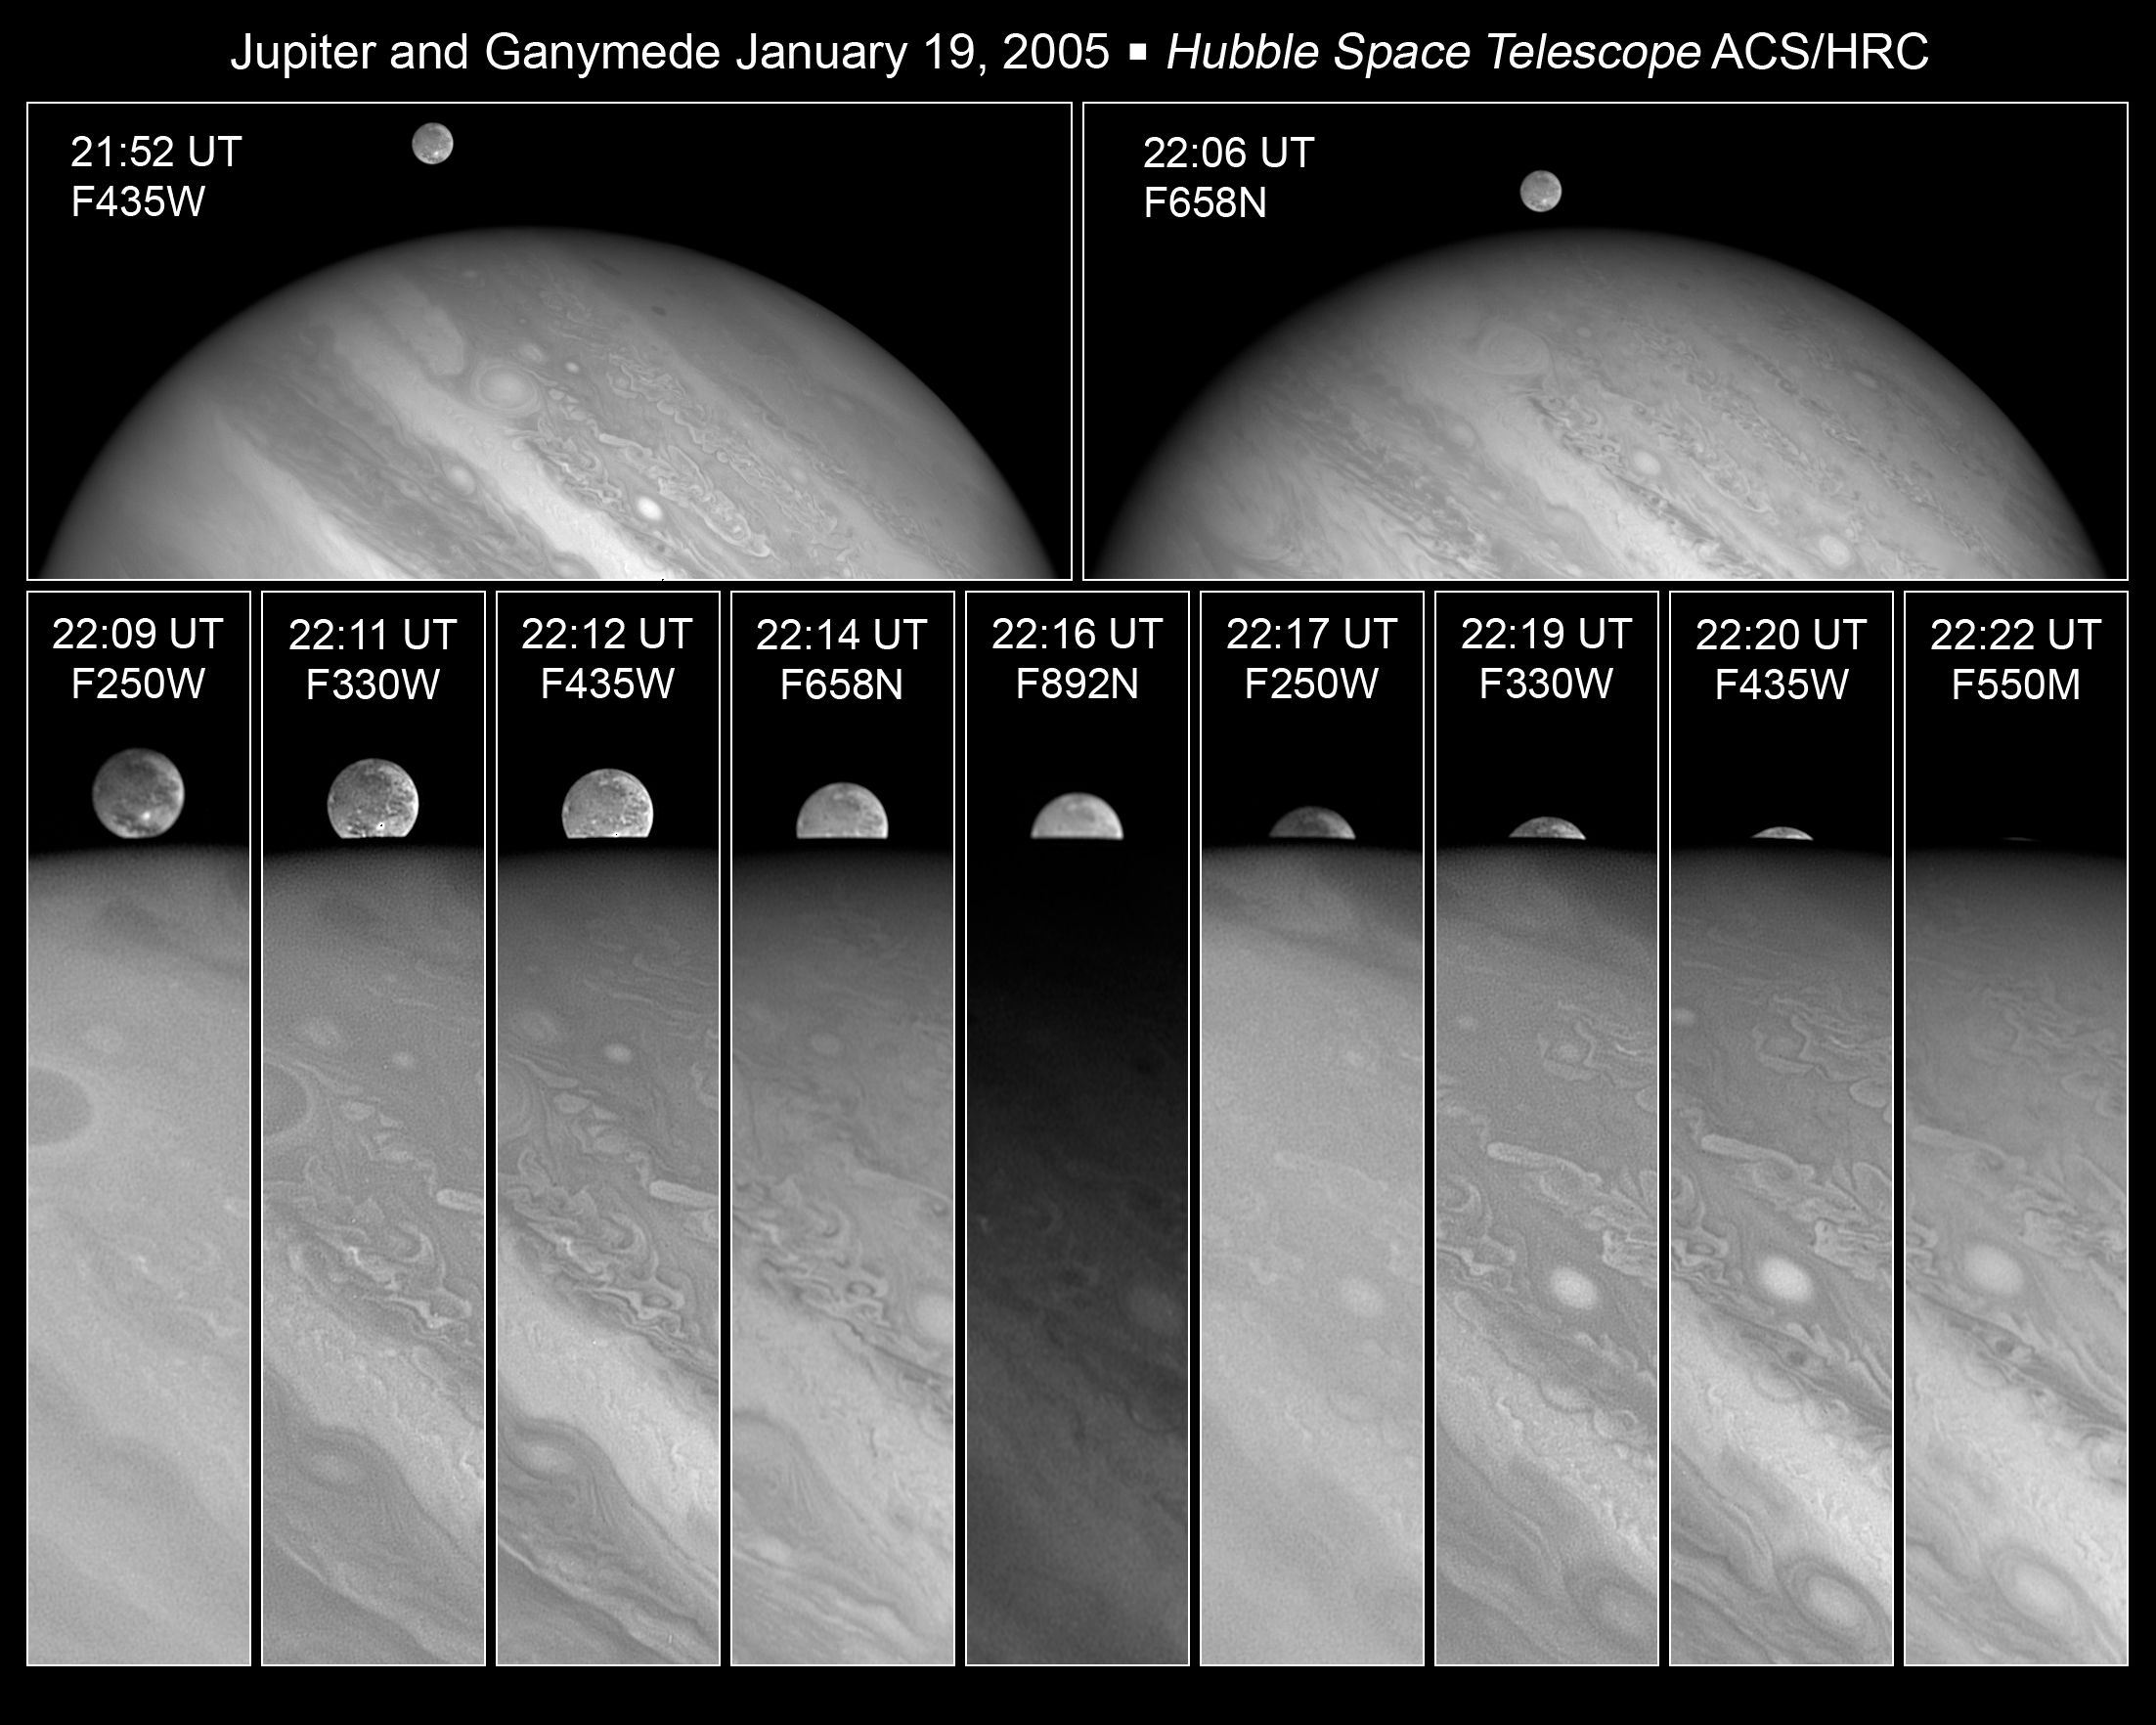

Ganymede disappears behind Jupiter

This series of images taken with the NASA/ESA Hubble Space Telescope shows Jupiter's largest moon, Ganymede, disappearing behind the planet.

Ganymede completes an orbit around Jupiter every seven days. Because Ganymede's orbit is tilted nearly edge-on to Earth, it routinely can be seen playing a game of "peek-a- boo", passing in front of and disappearing behind its giant host, only to reemerge later. Composed of rock and ice, Ganymede is the largest moon in our Solar System. It is even larger than the planet Mercury.

The top images show Ganymede next to Jupiter. The images were taken in blue and red light on 19 Jan. 2005 with Hubble's Advanced Camera for Surveys. The close-up images at bottom follow Ganymede as it ducks behind Jupiter a few minutes later.

Credit: NASA, ESA and E. Karkoschka (University of Arizona)